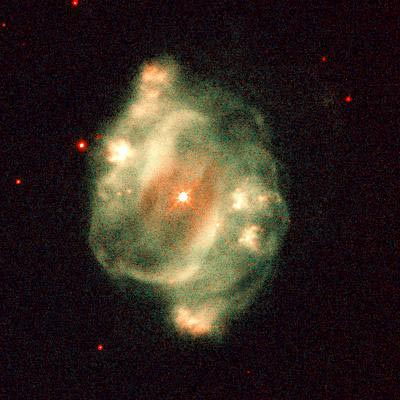

NGC 5307

This image is a part of the Hubble Gallery of Planetary Nebulae.

Credit: Howard Bond (ST ScI) and NASA/ESA